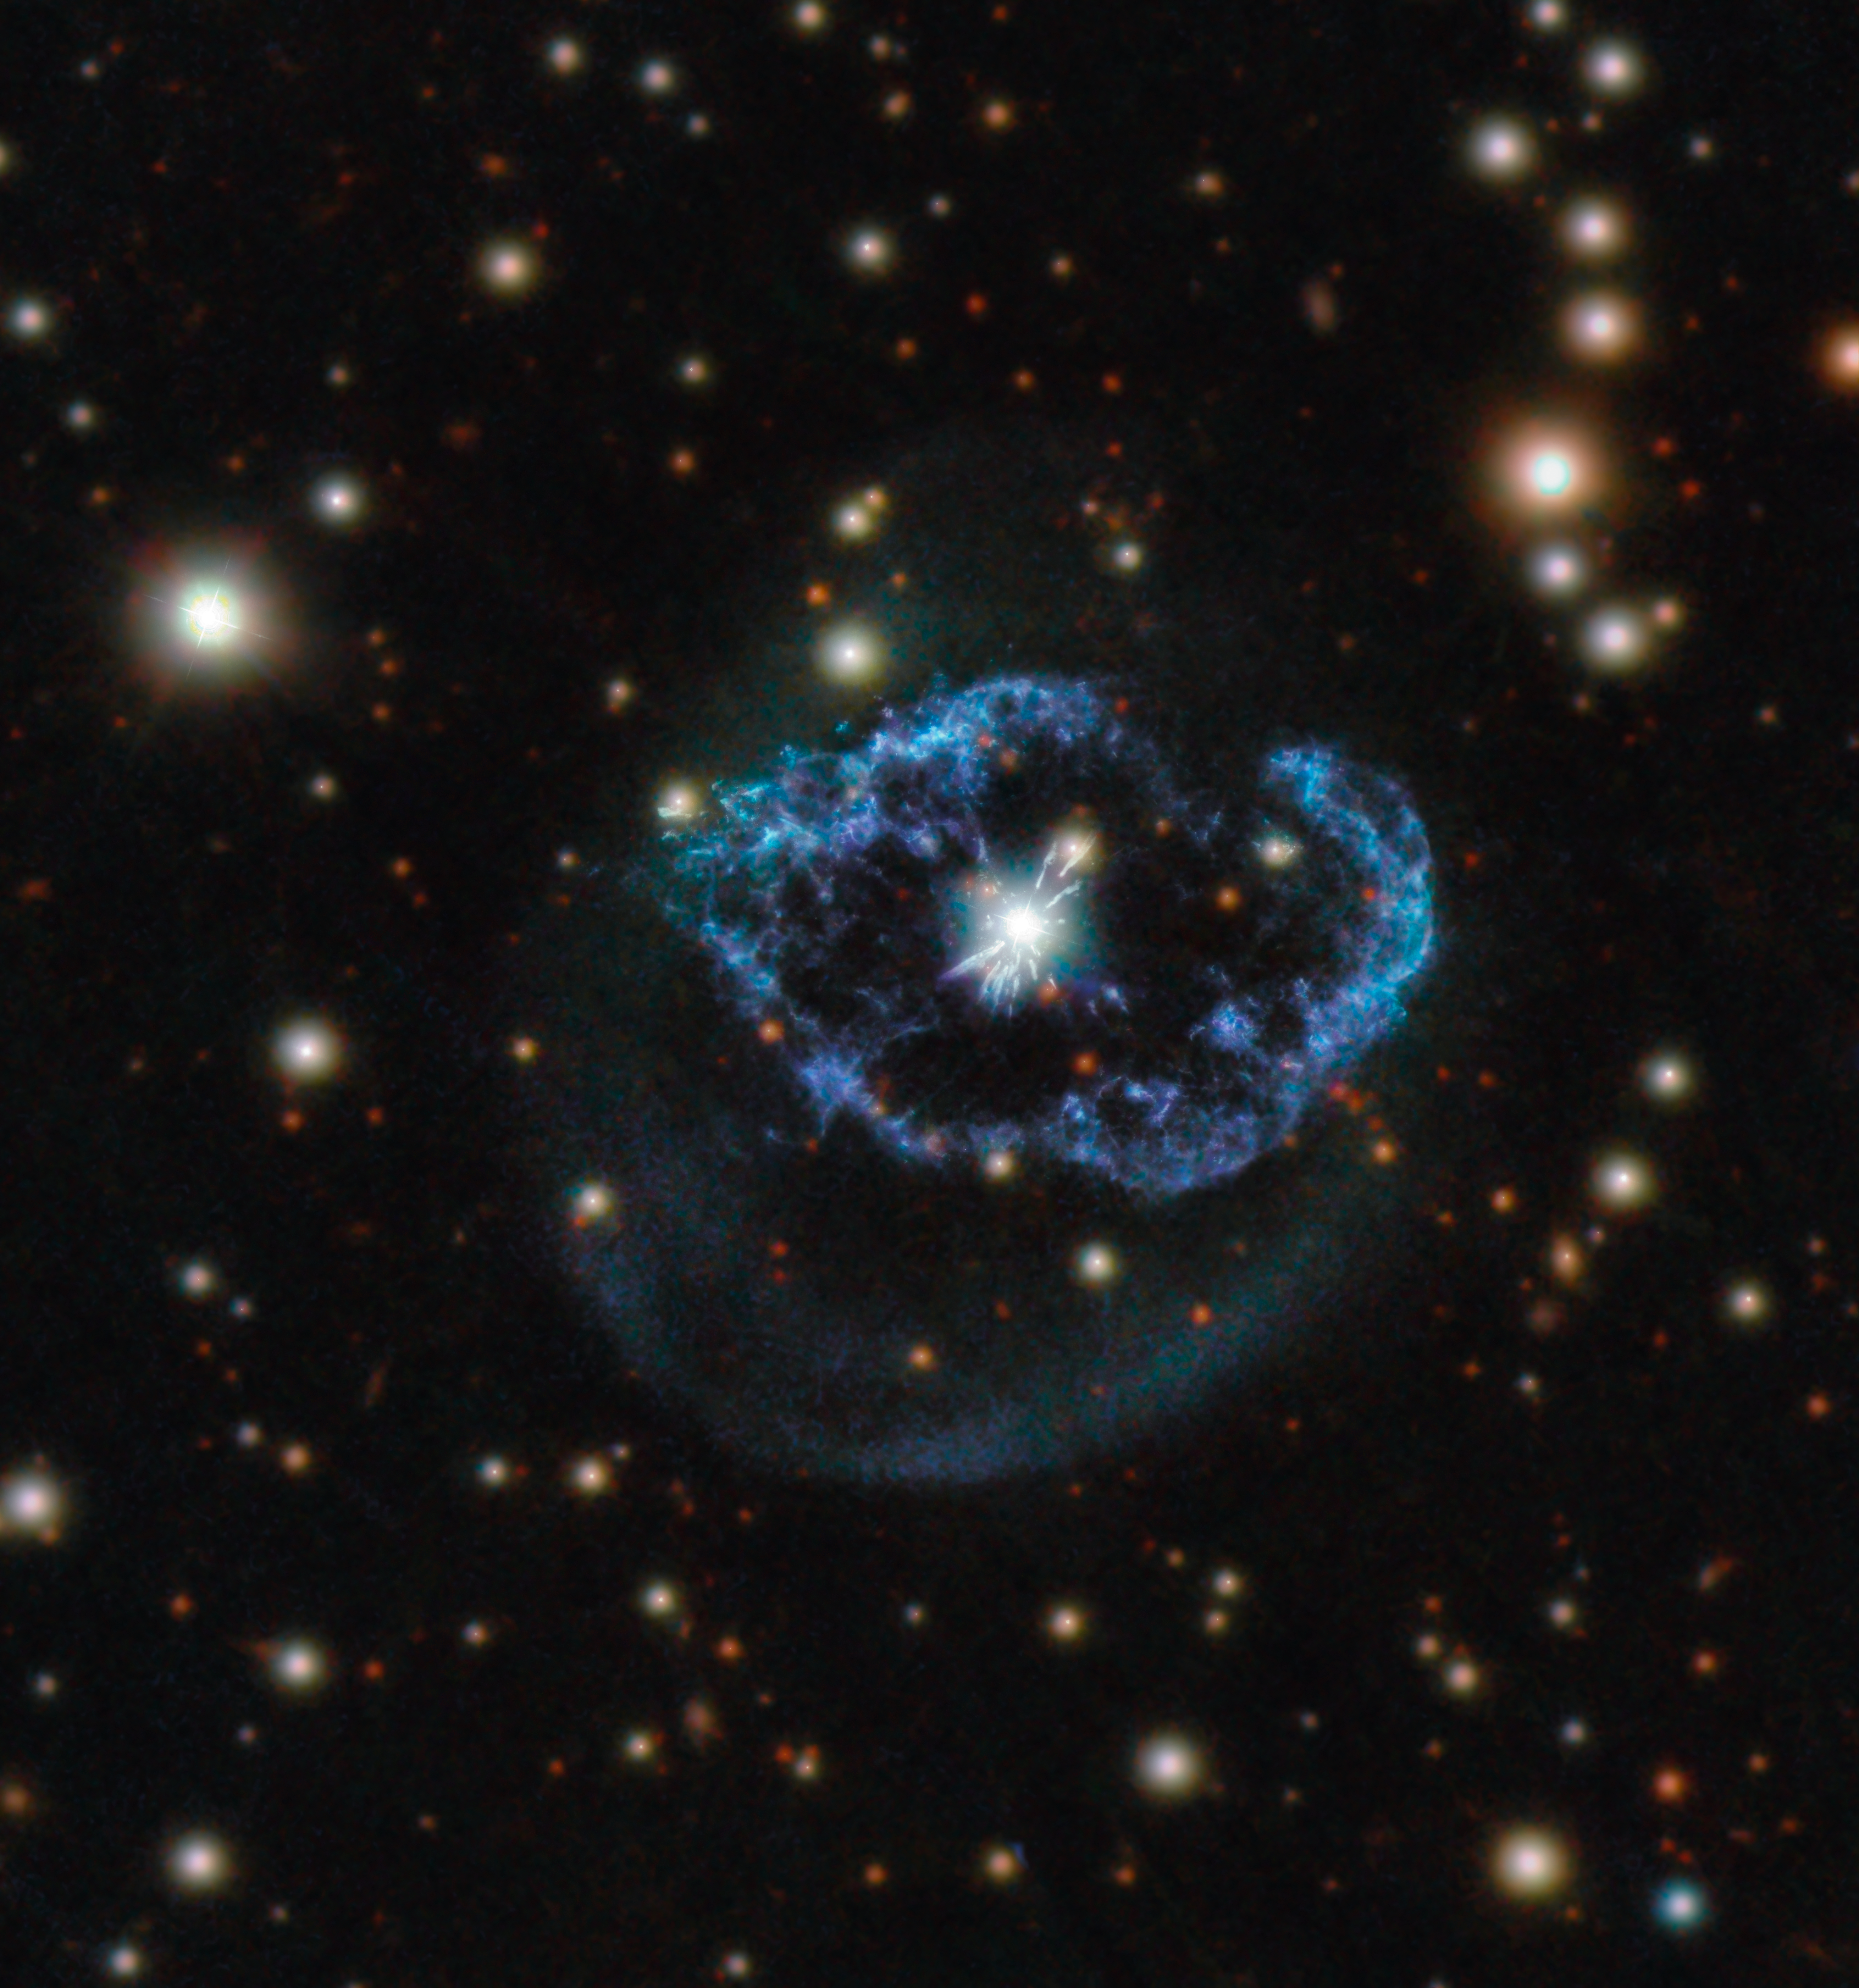

A Flash of Life

Located around 5000 light-years away in the constellation of Cygnus (The Swan), Abell 78 is an unusual type of planetary nebula.

After exhausting the nuclear fuel in their cores, stars with a mass of around 0.8 to 8 times the mass of our Sun collapse to form dense and hot white dwarf stars. As this process occurs, the dying star will throw off its outer layers of material, forming an elaborate cloud of gas and dust known as a planetary nebula. This phenomenon is not uncommon, and planetary nebulae are a popular focus for astrophotographers because of their often beautiful and complex shapes. However, a few like Abell 78 are the result of a so-called “born again” star.

Although the core of the star has stopped burning hydrogen and helium, a thermonuclear runaway at its surface ejects material at high speeds. This ejecta shocks and sweeps up the material of the old nebula, producing the filaments and irregular shell around the central star seen in this Picture of the Week, which features data from Hubble’s Wide Field Camera 3 and PANSTARSS.

Credit: ESA/Hubble & NASA, M. Guerrero Acknowledgement: Judy Schmidt